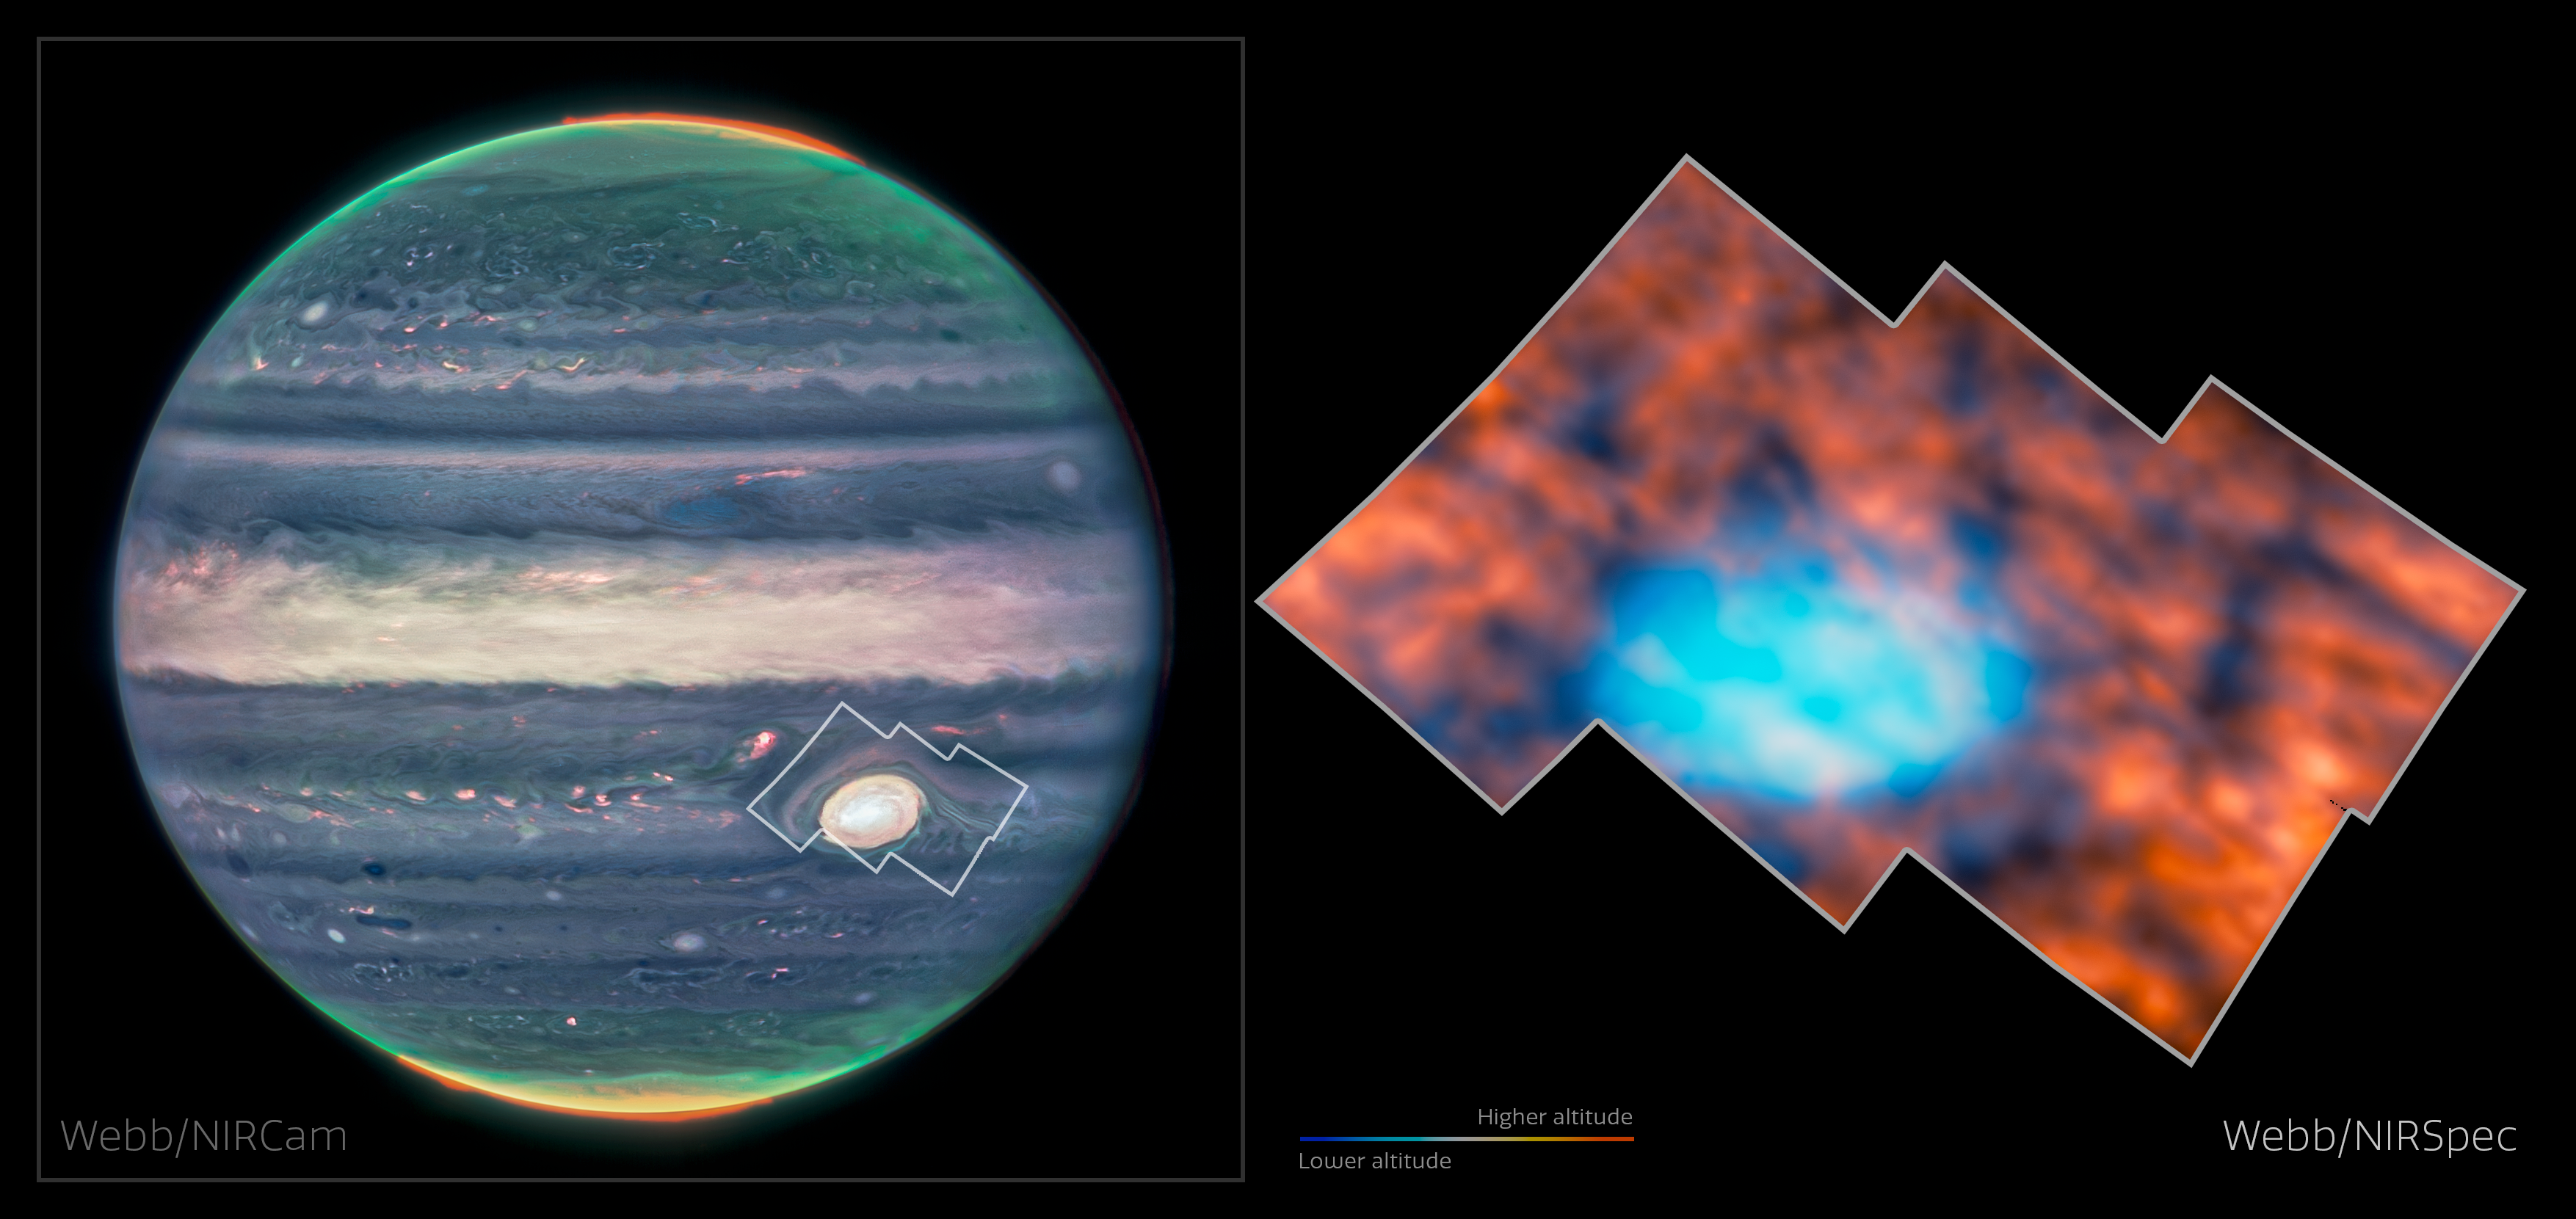

Jupiter’s atmosphere around the Great Red Spot (NIRCam and NIRSpec)

New observations of the Great Red Spot on Jupiter have revealed that the planet’s atmosphere above and around the infamous storm is surprisingly interesting and active. This graphic shows the region observed by Webb — first its location on a NIRCam image of the whole planet (left), and the region itself (right), imaged by Webb’s Near-InfraRed Spectrograph (NIRSpec).

The NIRSpec image is stitched together from six NIRSpec Integral Field Unit images taken in July 2022, each around 300 square kilometres, and shows infrared light emitted by hydrogen molecules in Jupiter’s ionosphere. These molecules lie over 300 kilometres above the clouds of the storm, where light from the Sun ionises the hydrogen and stimulates this infrared emission. In this image, redder colours display the hydrogen emission from these high altitudes in the planet’s ionosphere. Bluer colours show infrared light from lower altitudes, including cloud-tops in the atmosphere and the very prominent Great Red Spot.

Jupiter is distant from the Sun and therefore receives a uniform, low level of daylight, meaning that most of the planet’s surface is relatively dim at these infrared wavelengths — especially compared to the emission from molecules near the poles, where Jupiter’s magnetic field is especially strong. Contrary to the researchers’ expectations that this area would therefore look homogeneous in nature, it hosts a variety of intricate structures, including dark arcs and bright spots, across the entire field of view.

Credit: ESA/Webb, NASA & CSA, Jupiter ERS Team, J. Schmidt, H. Melin, M. Zamani (ESA/Webb)